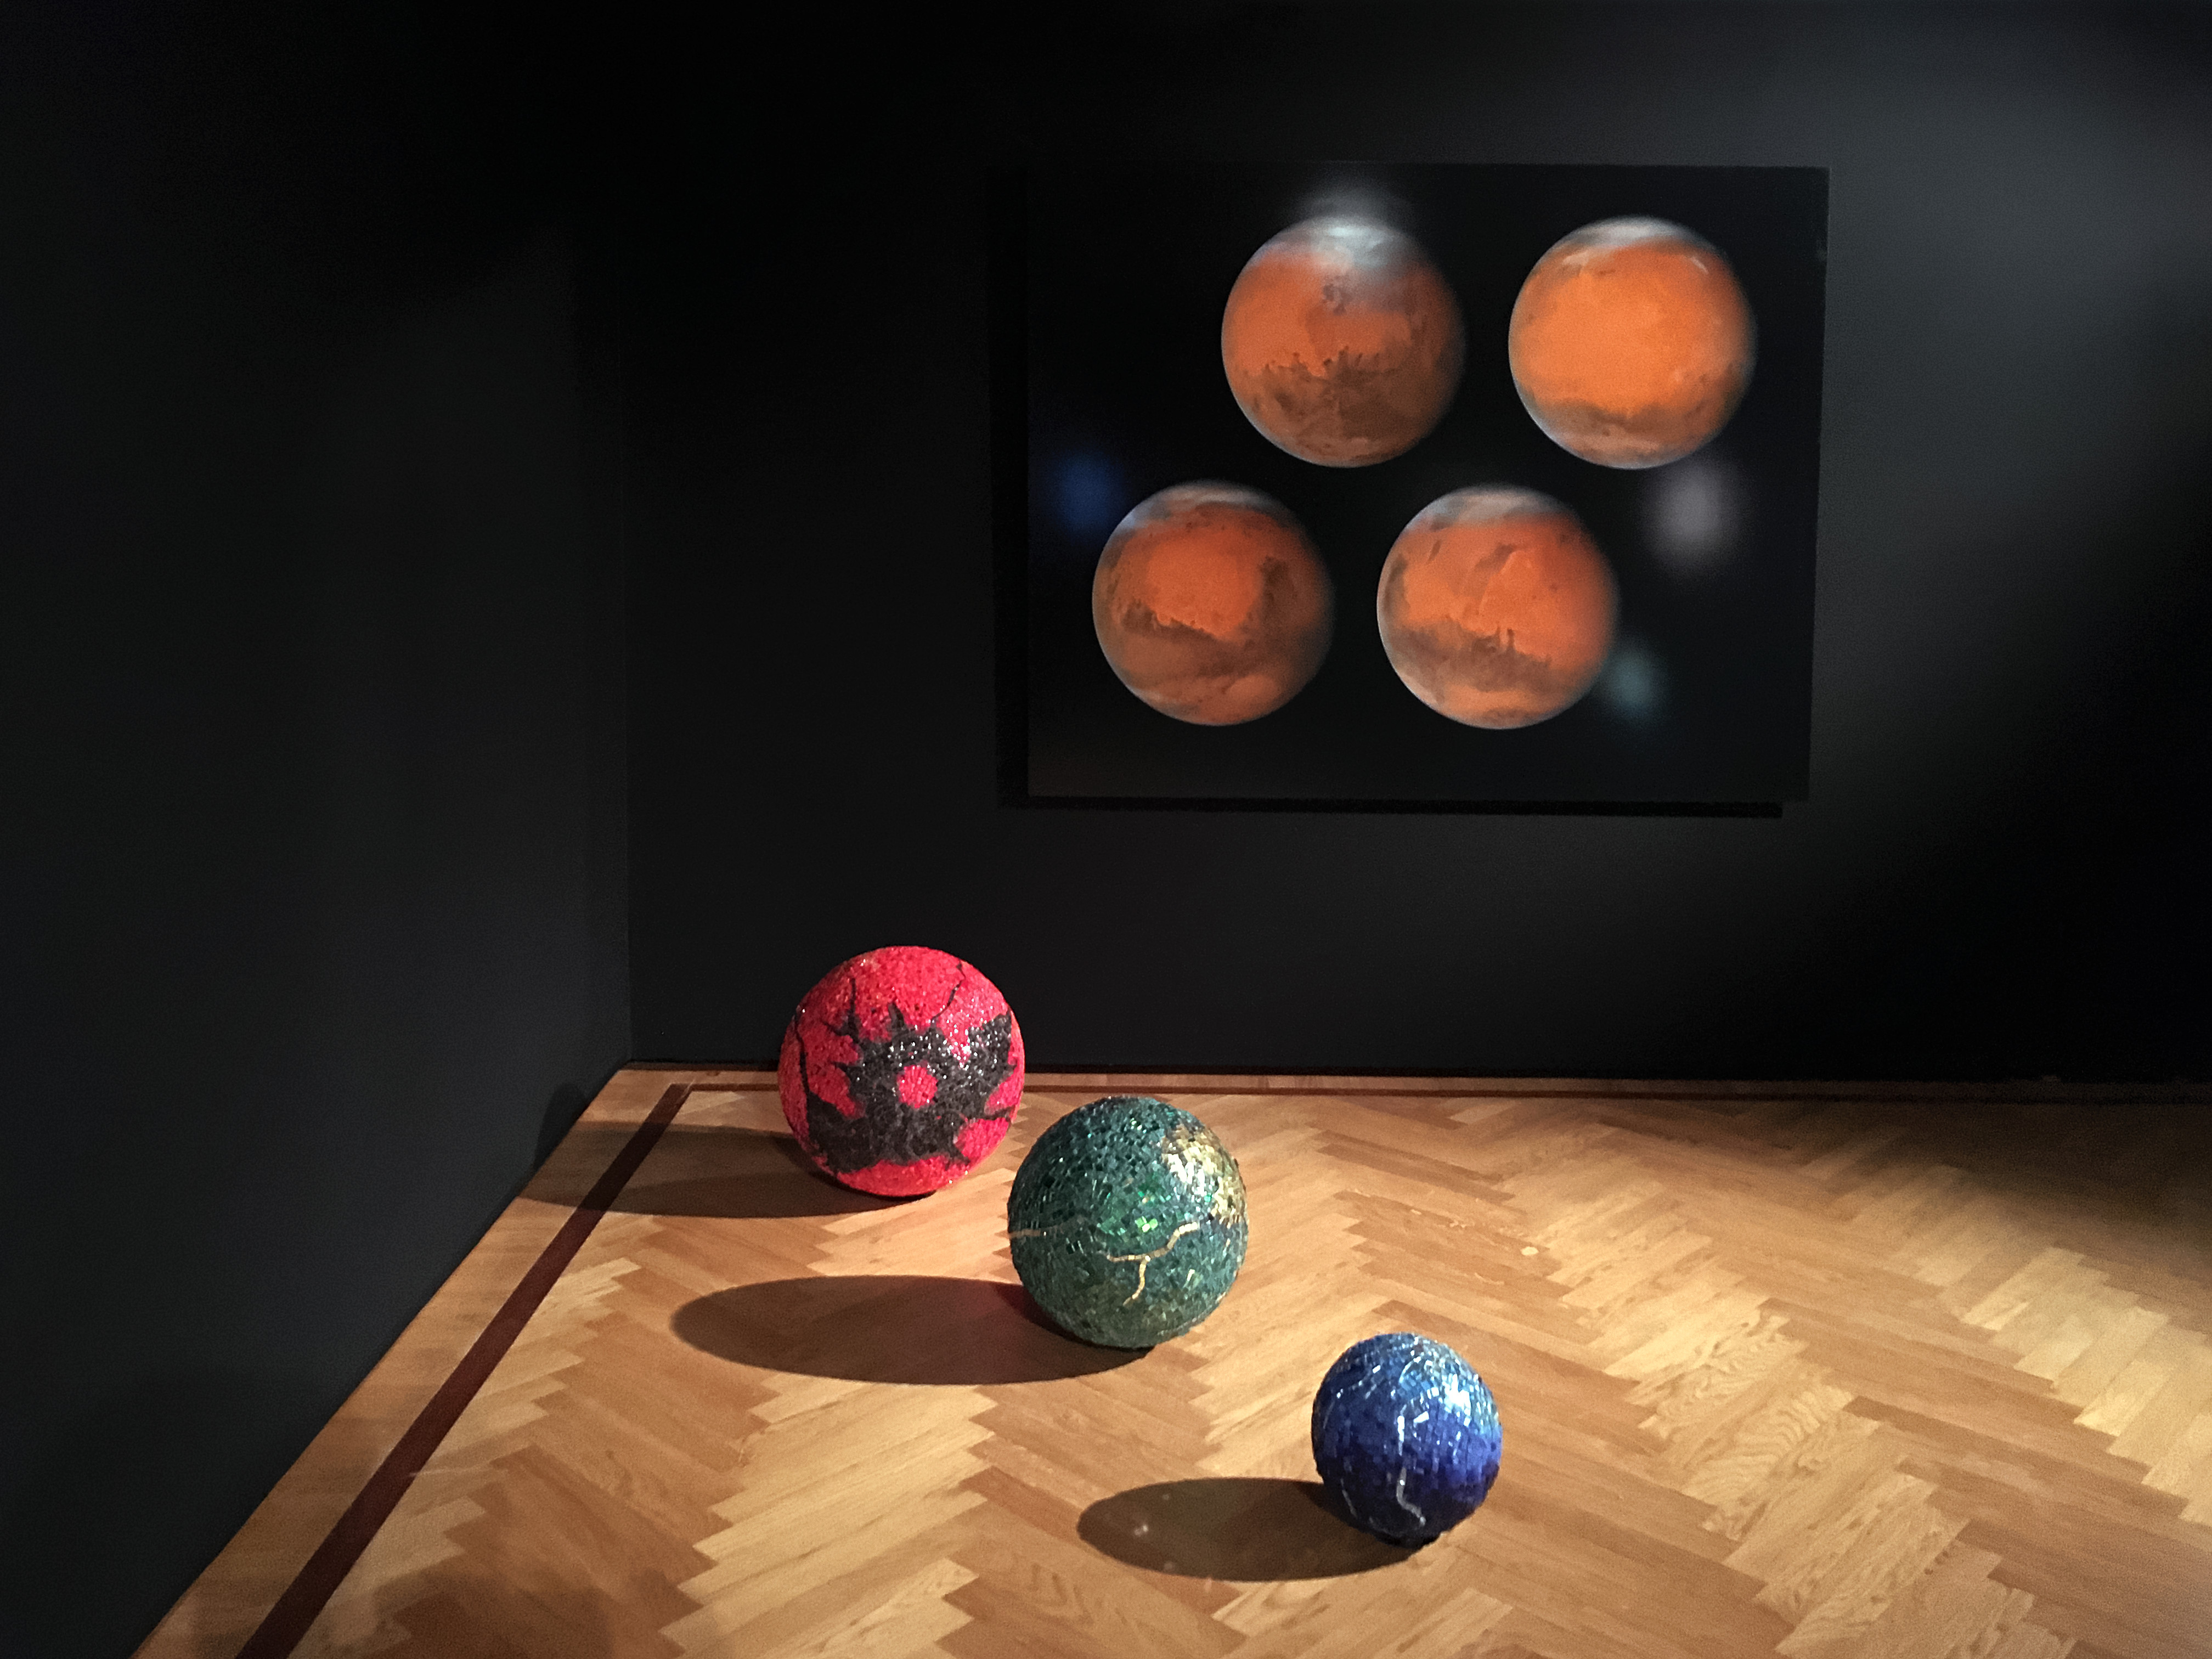

Our Place in Space — Our place in the Solar System

Artist Maraluisa Tadei presents her interpretation of our place in the Solar System: Spheres encrusted with mosaics of Murano glass are set on the floor in an interpretation of a dreamlike Solar System.

Credit: ESA/Hubble, Pam Jeffries